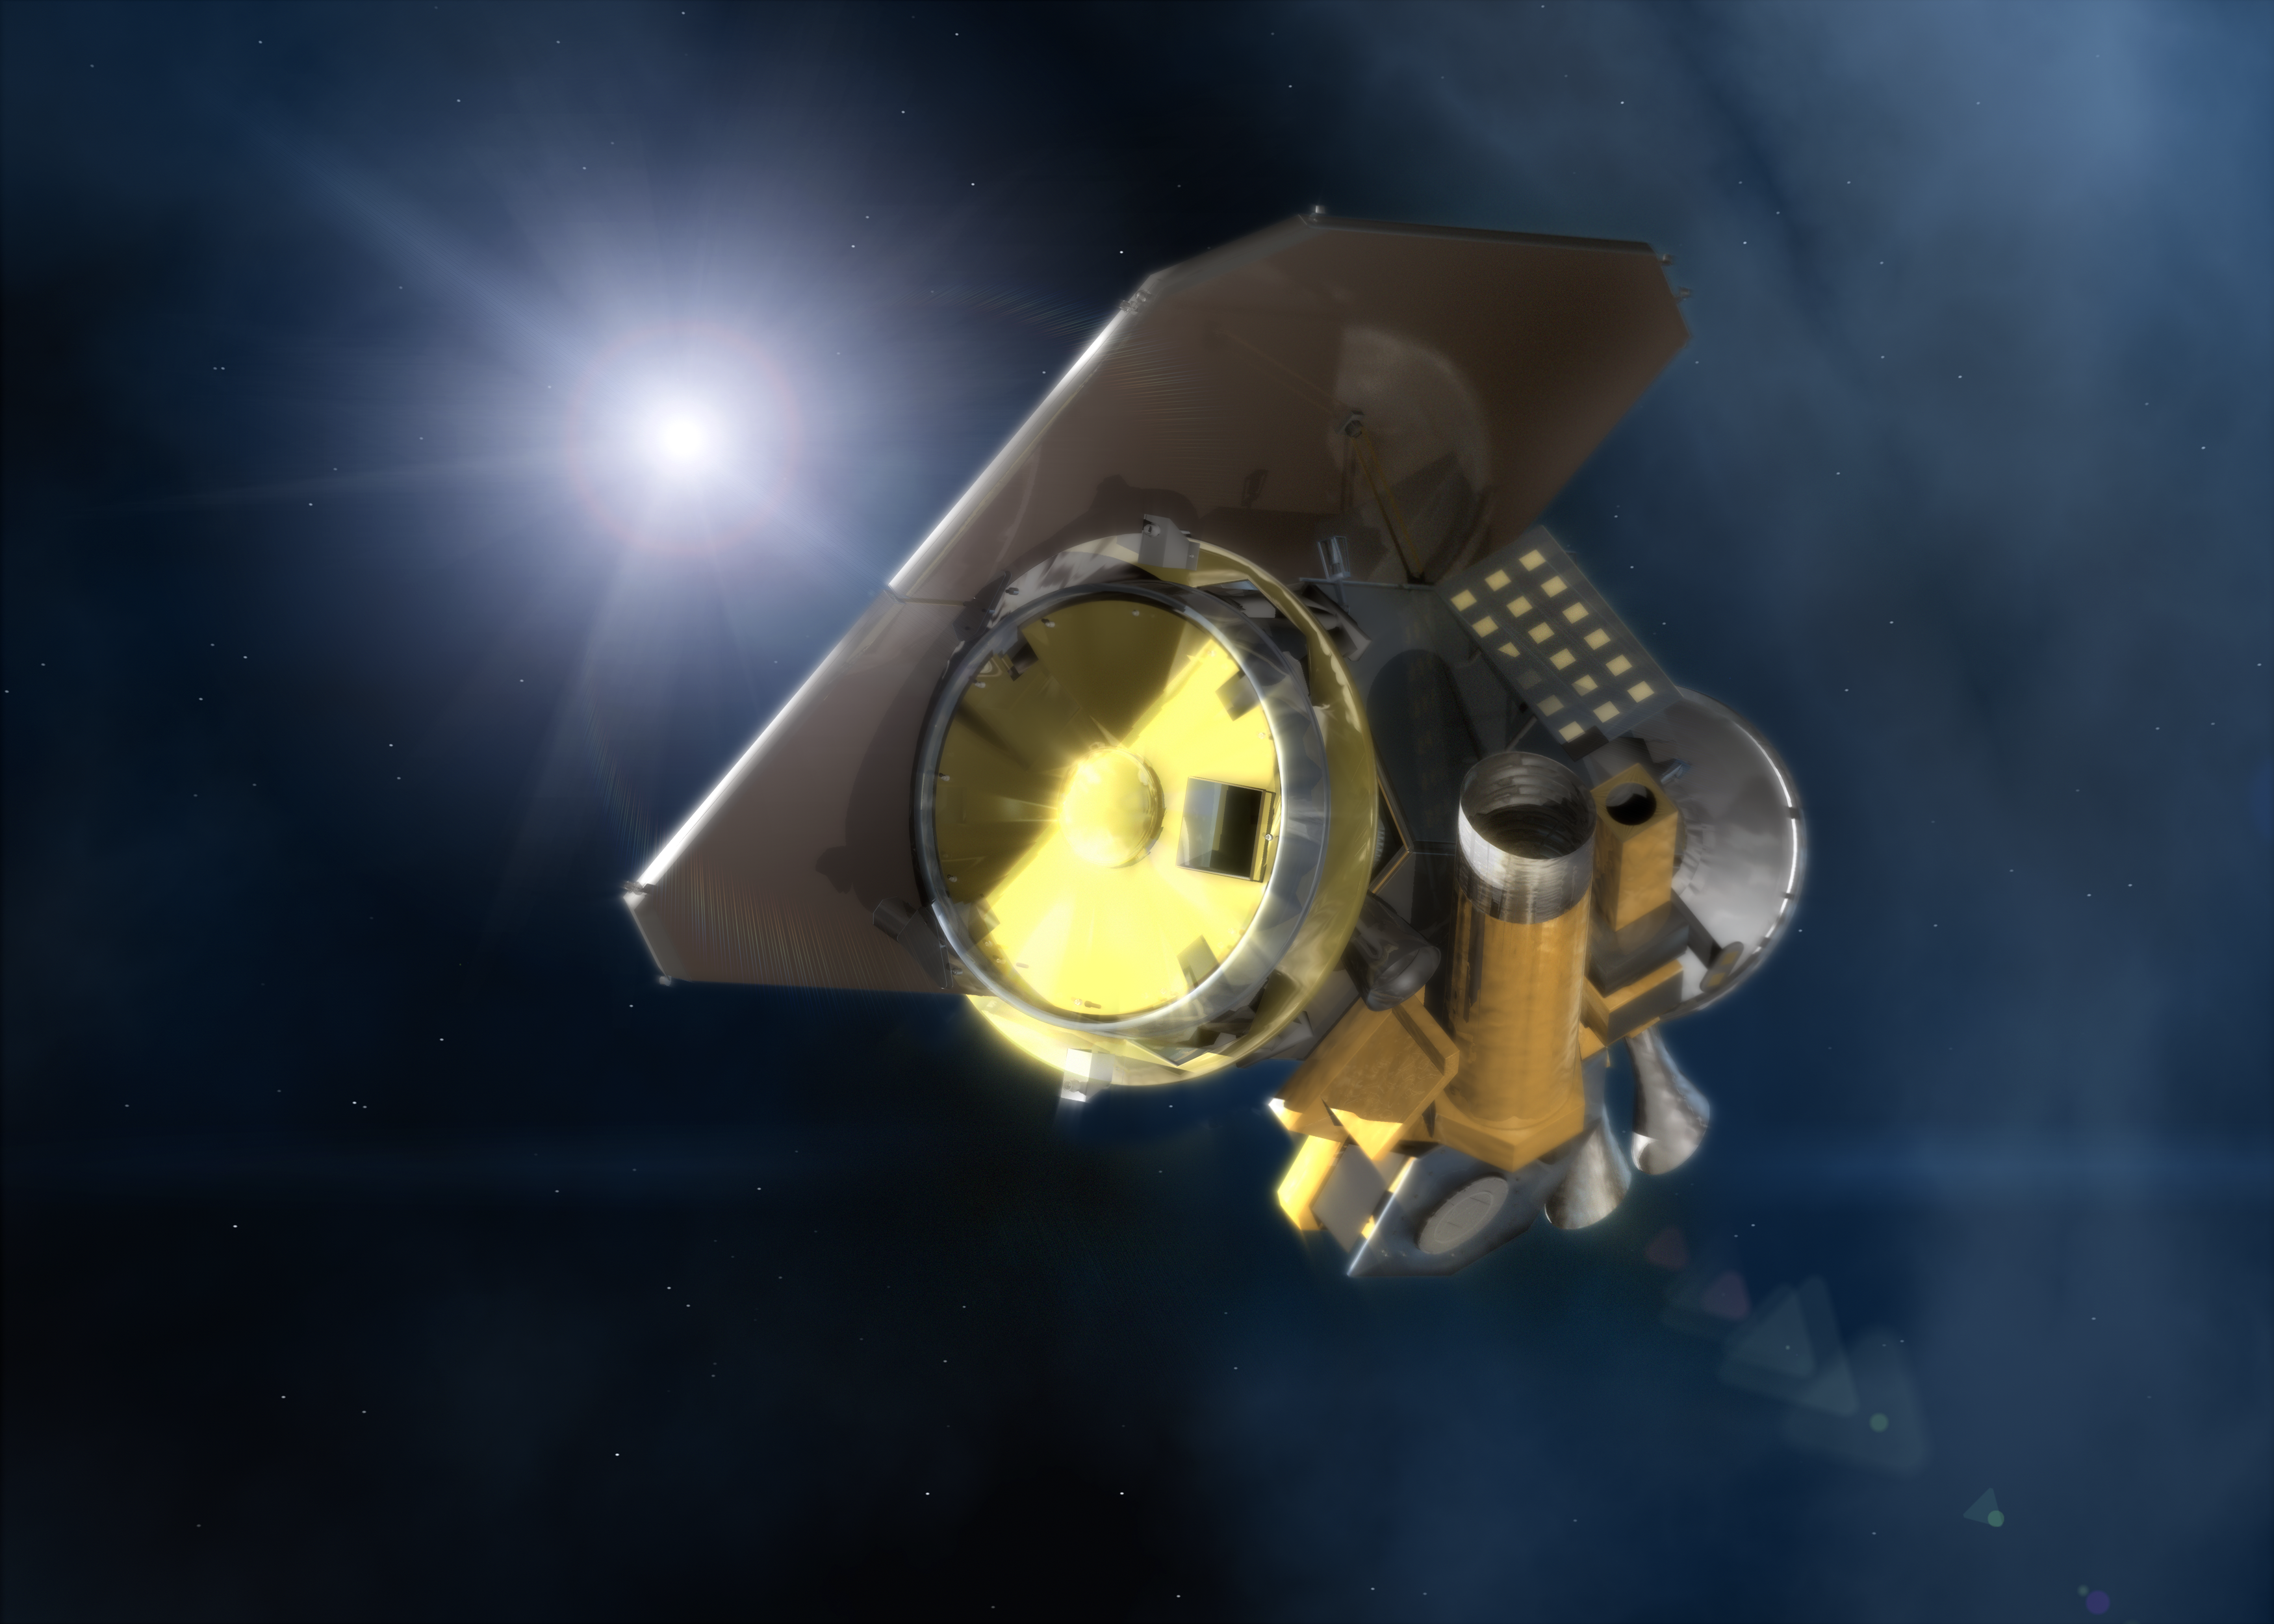

NASA's Deep Impact spacecraft [artist's impression]

Close-up of NASA's Deep Impact spacecraft (artist's impression).

Credit: ESA & NASA